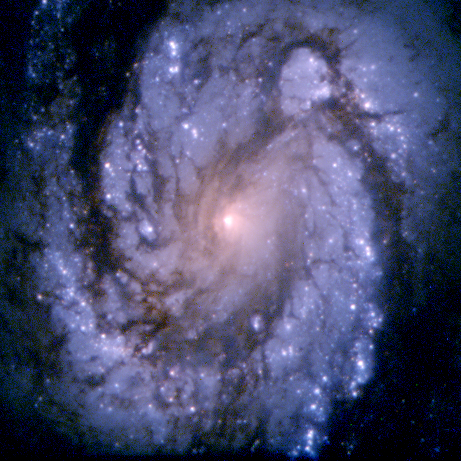

M100 PC chip

An image of the grand design spiral galaxy M100 obtained with the second generation Wide Field and Planetary Camera.

Credit: NASA & ESA